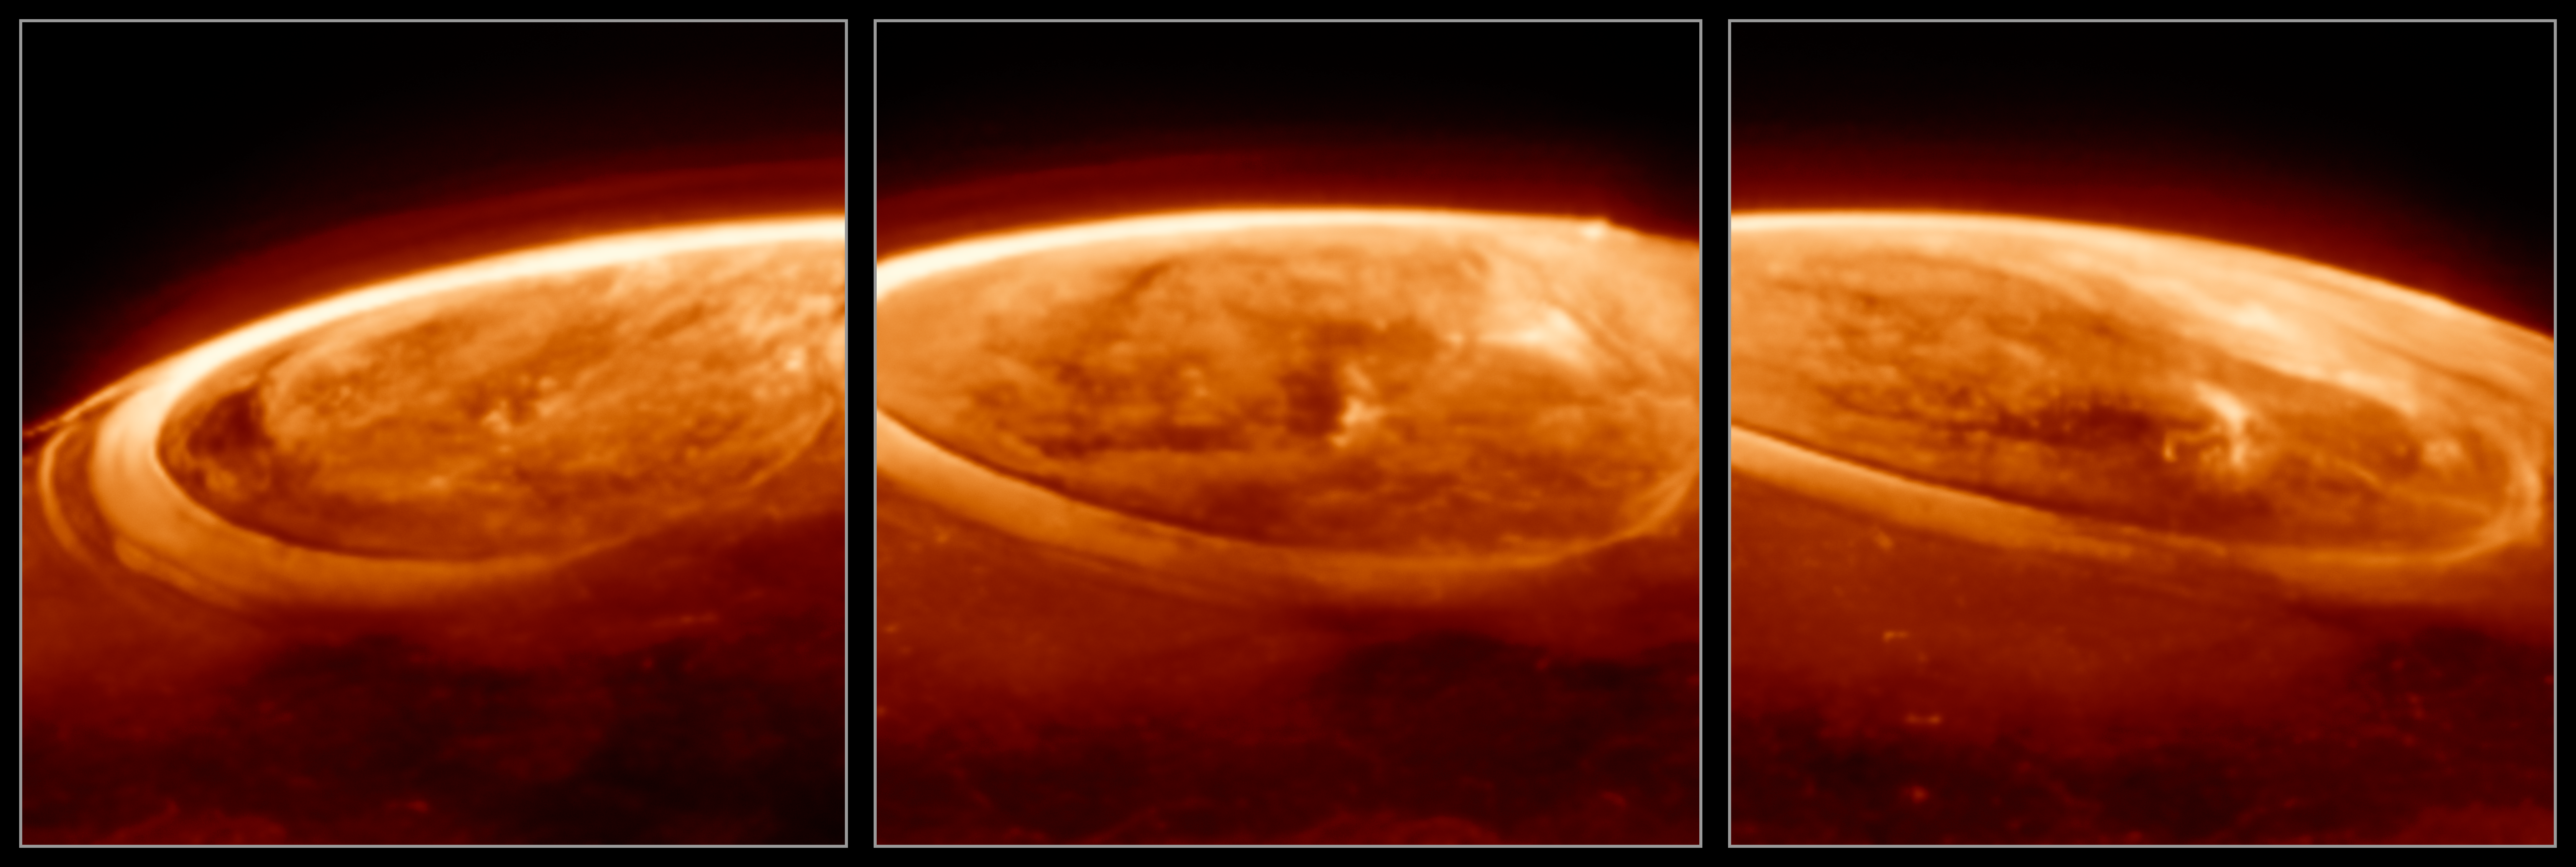

Close-up observations of auroras on Jupiter (December 2023)

The NASA/ESA/CSA James Webb Space Telescope has captured new details of the auroras on our Solar System’s largest planet. The dancing lights observed on Jupiter are hundreds of times brighter than those seen on Earth.

These observations of Jupiter’s auroras were captured with Webb’s Near-InfraRed Camera (NIRCam) on 25 December 2023 (F335M filter). Scientists found that the emission from the trihydrogen ion, known as H3+, is far more variable than previously believed. H3+ is created by the impact of high energy electrons on molecular hydrogen. Because this emission shines brightly in the infrared, Webb’s instruments are well equipped to observe it.

A video of these observations can be found here.

Credit: ESA/Webb, NASA, CSA, J. Nichols (University of Leicester), M. Zamani (ESA/Webb)